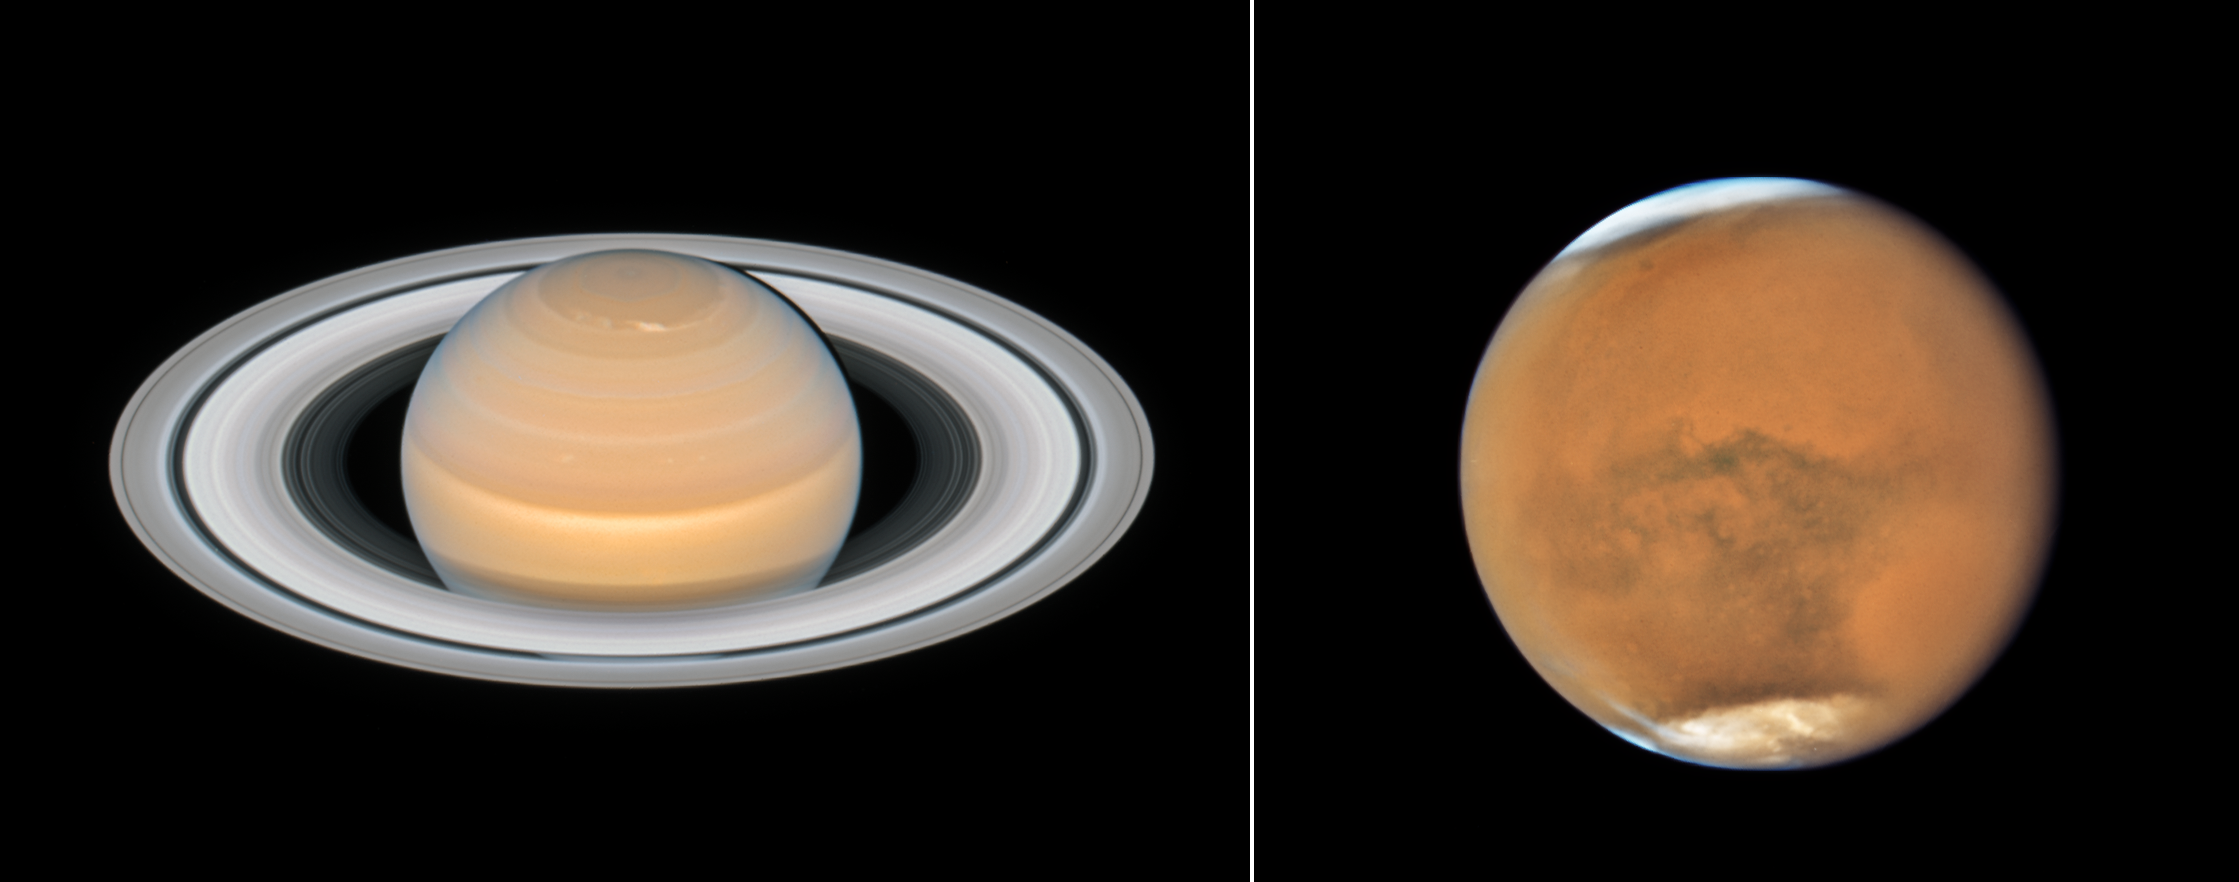

Mars and Saturn close to opposition

This image shows the recent observations of the planets Mars and Saturn made with the NASA/ESA Hubble Space Telescope. The observations of both objects were made in June and July 2018 and show the planets close to their opposition.

Hubble’s high-resolution images of the planets and moons in our Solar System can only be surpassed by pictures taken from spacecraft that actually visit them. Hubble even has one advantage over these probes: it can look at these objects periodically and observe them over much longer periods than any passing probe could.

Hubble’s first observations of Mars date back as far 1991 and the first observation of Saturn was performed in 1990 — the year Hubble was launched.

Credit: Saturn: NASA, ESA, A. Simon (GSFC) and the OPAL Team, and J. DePasquale (STScI); Mars: NASA, ESA, and STScI